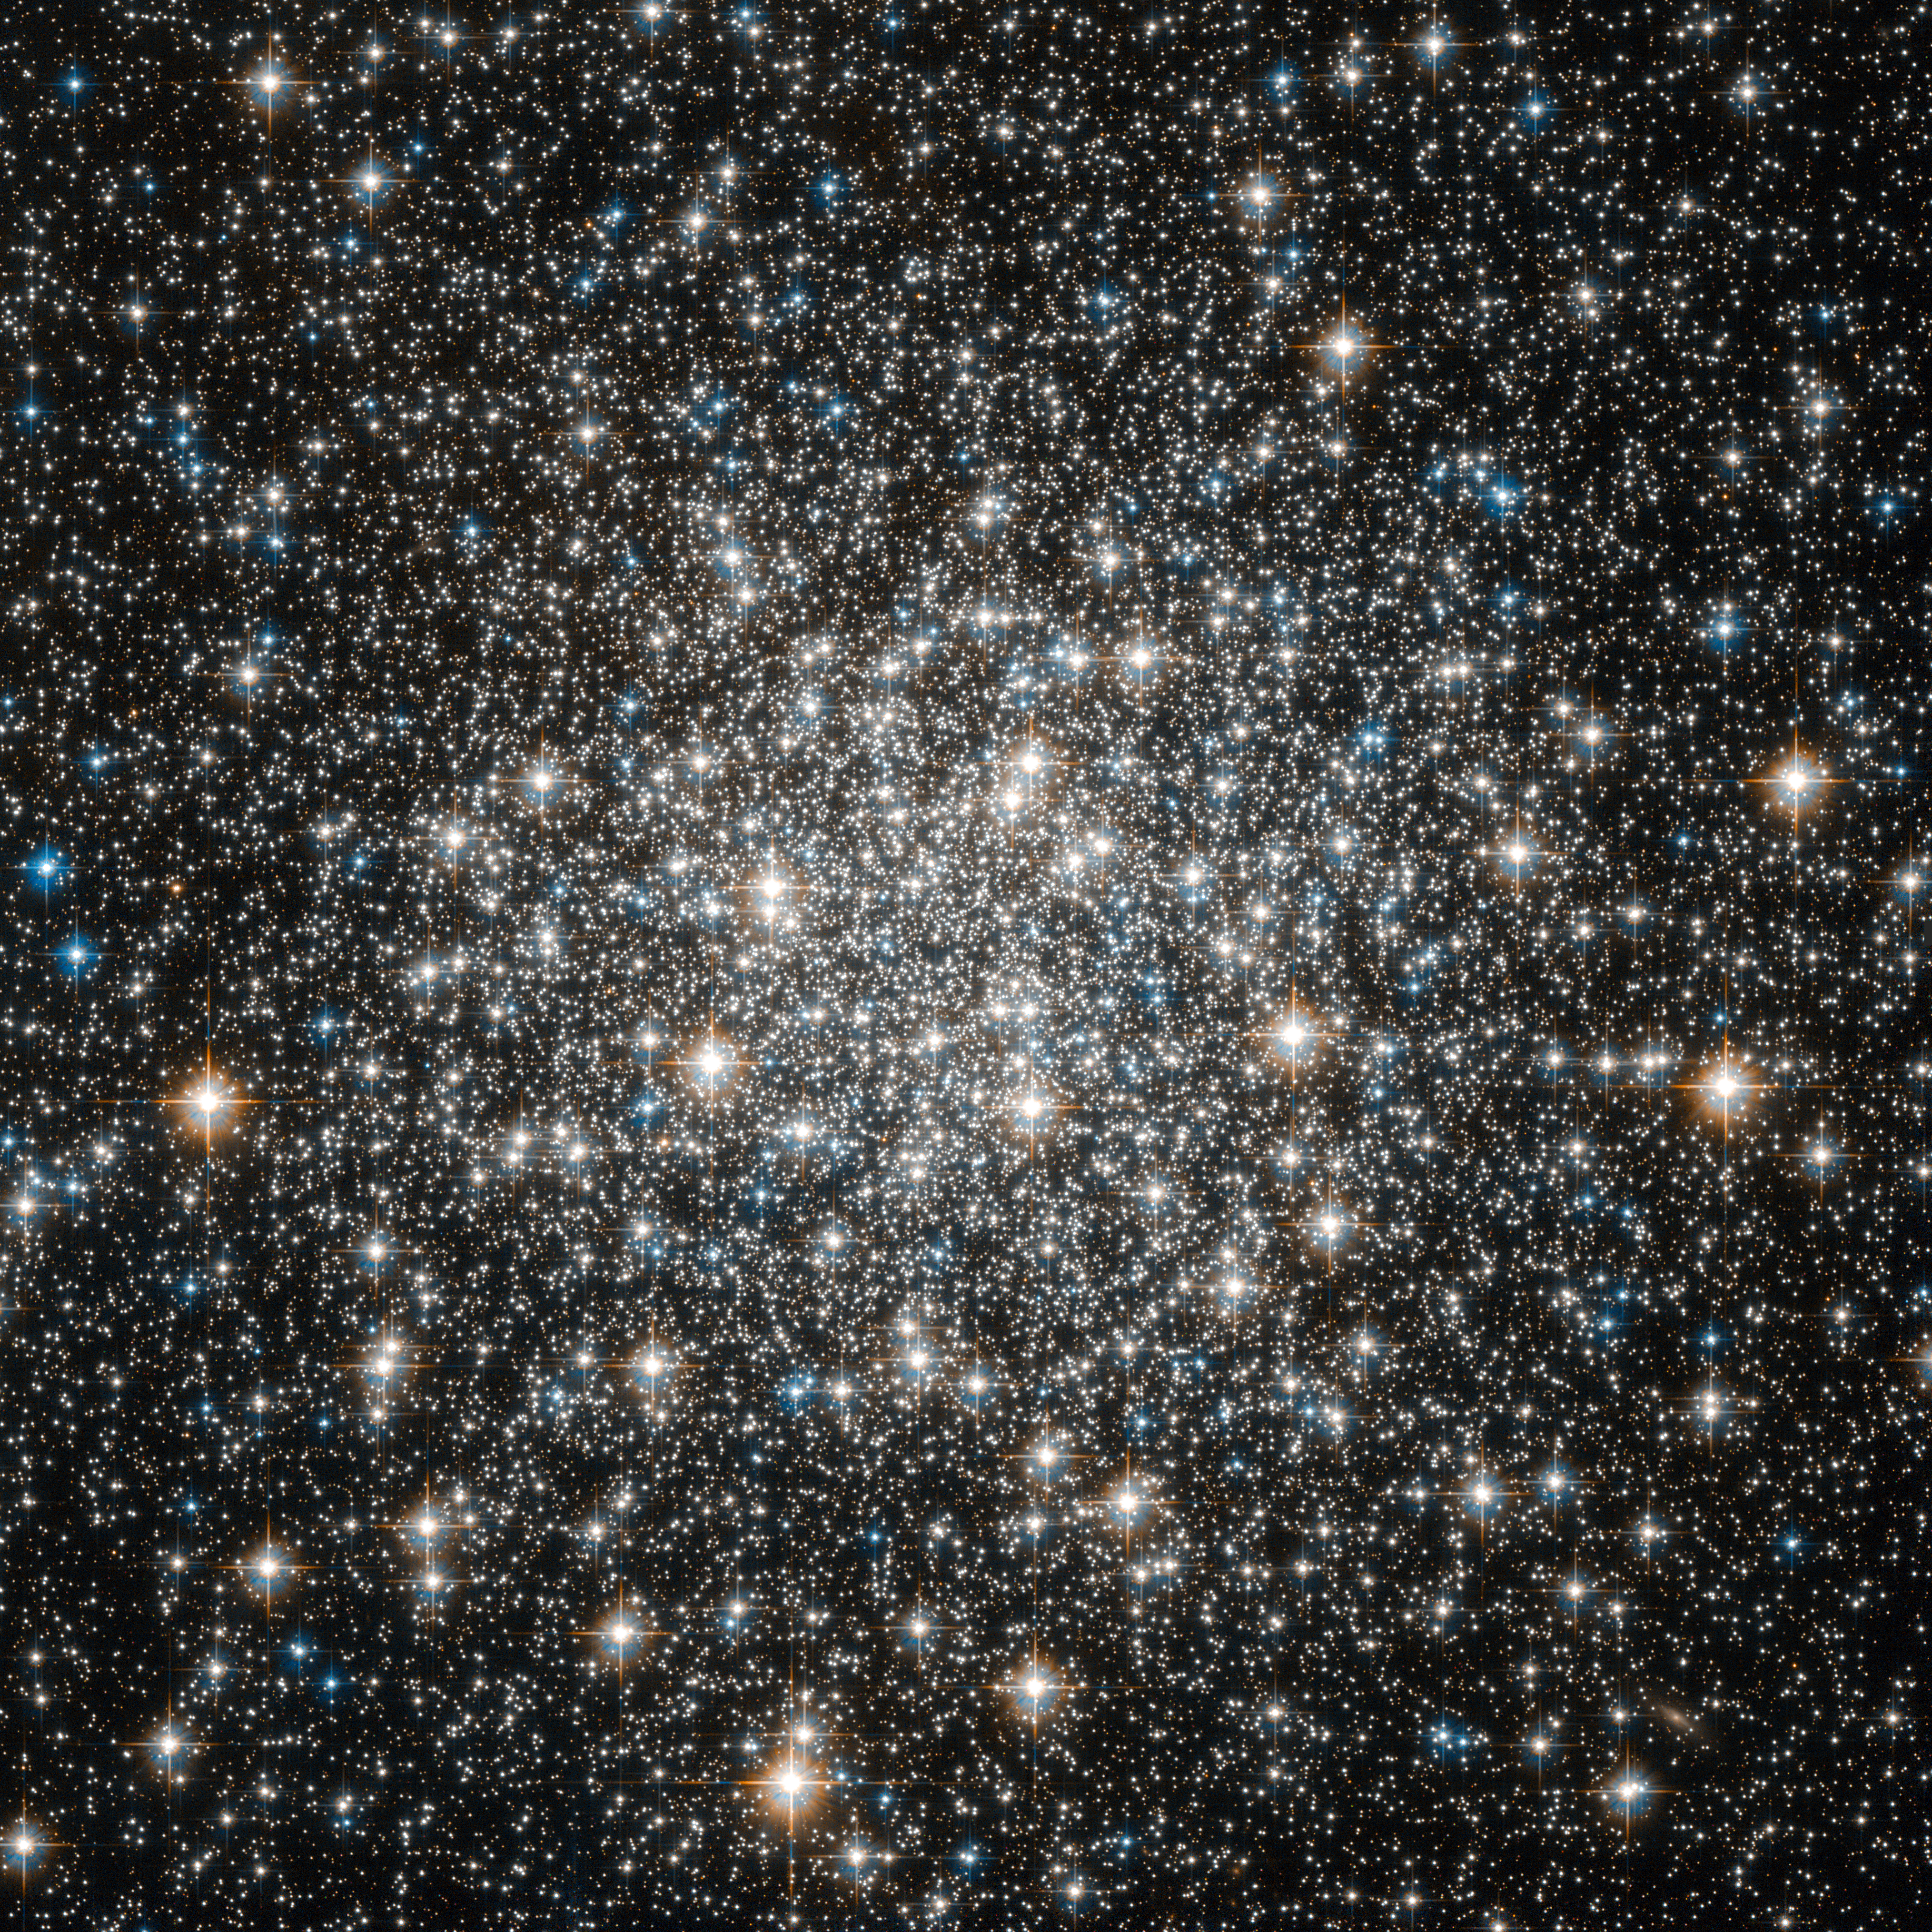

Globular cluster M 10

Like many of the most famous objects in the sky, globular cluster Messier 10 was of little interest to its discoverer: Charles Messier, the 18th century French astronomer, catalogued over 100 galaxies and clusters, but was primarily interested in comets. Through the telescopes available at the time, comets, nebulae, globular clusters and galaxies appeared just as faint, diffuse blobs and could easily be confused for one another.

Only by carefully observing their motion — or lack of it — were astronomers able to distinguish them: comets move slowly relative to the stars in the background, while other more distant astronomical objects do not move at all.

Messier’s decision to catalogue all the objects that he could find and that were not comets, was a pragmatic solution which would have a huge impact on astronomy. His catalogue of just over 100 objects includes many of the most famous objects in the night sky. Messier 10, seen here in an image from the NASA/ESA Hubble Space Telescope, is one of them. Messier described it in the very first edition of his catalogue, which was published in 1774 and included the first 45 objects he identified.

Messier 10 is a ball of stars that lies about 15 000 light-years from Earth, in the constellation of Ophiuchus (The Serpent Bearer). Approximately 80 light-years across, it should therefore appear about two thirds the size of the Moon in the night sky. However, its outer regions are extremely diffuse, and even the comparatively bright core is too dim to see with the naked eye.

Hubble, which has no problems seeing faint objects, has observed the brightest part of the centre of the cluster in this image, a region which is about 13 light-years across.

This image is made up of observations made in visible and infrared light using Hubble’s Advanced Camera for Surveys. The observations were carried out as part of a major Hubble survey of globular clusters in the Milky Way.

A version of this image was entered into the Hubble’s Hidden Treasures Image Processing Competition by contestant flashenthunder. Hidden Treasures is an initiative to invite astronomy enthusiasts to search the Hubble archive for stunning images that have never been seen by the general public. The competition has now closed and the results will be published soon.

Credit: ESA/Hubble & NASA